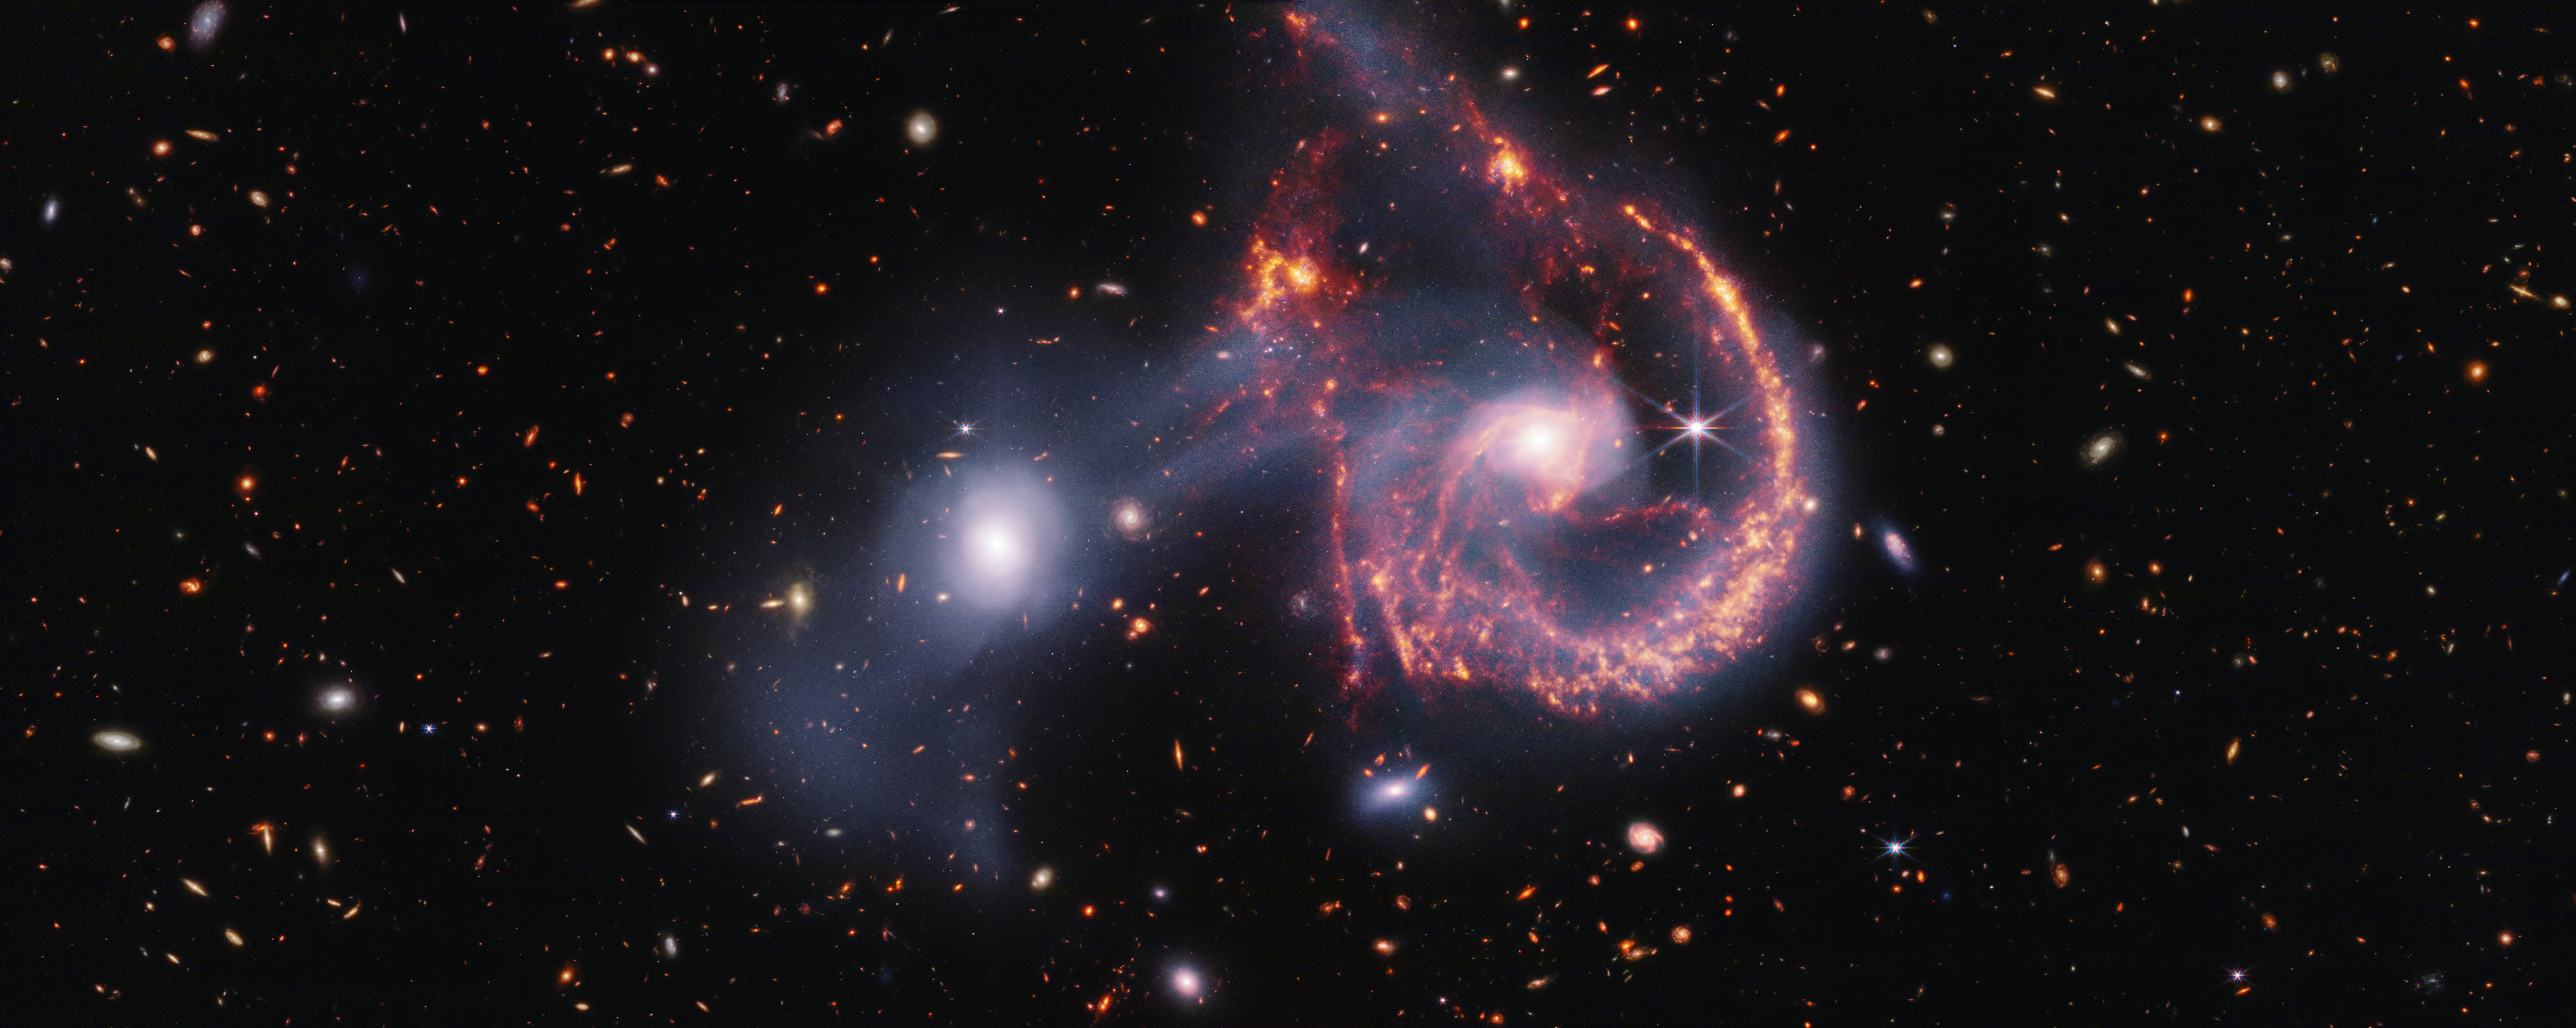

Arp 107 composite image (NIRCam + MIRI)

This composite image of Arp 107, created with data from the James Webb Space Telescope’s NIRCam (Near-InfraRed Camera) and MIRI (Mid-InfraRed Instrument), reveals a wealth of information about the star formation taking place in these two galaxies and how they collided hundreds of million years ago.

The near-infrared data, shown in white, show older stars, which shine brightly in both galaxies, as well as the tenuous gas bridge that runs between them. The vibrant background galaxies are also brightly illuminated at these wavelengths.

On the other hand, MIRI data show the young stars and star-forming regions in vibrant orange and red. Our view in the mid-infrared provides the best view of the collision point, given the noticeable gap at the top of the spiral galaxy. This collision not only began a new bout of star formation in the region, but also produced an endearing smile.

Credit: NASA, ESA, CSA, STScI